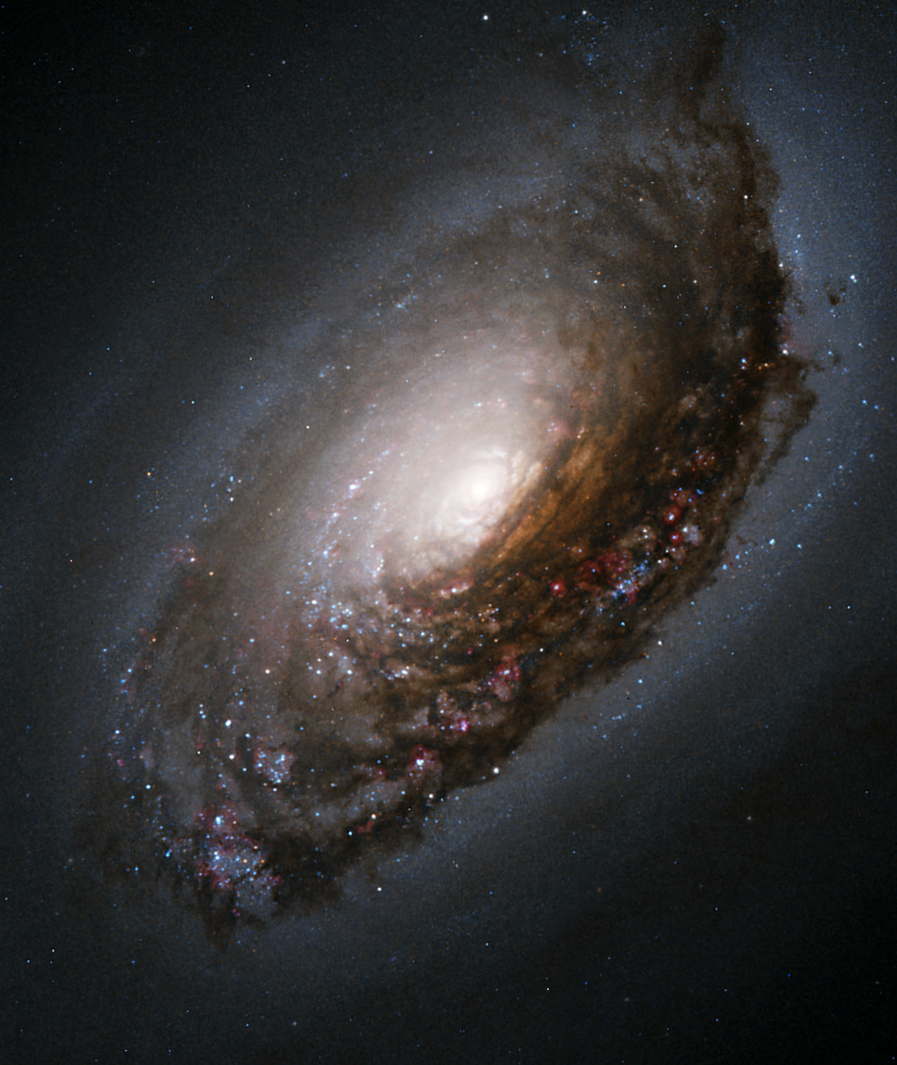

An abrasive collision gives one galaxy a "black eye"

A collision of two galaxies has left a merged star system with an unusual appearance as well as bizarre internal motions. Messier 64 (M64) has a spectacular dark band of absorbing dust in front of the galaxy's bright nucleus, giving rise to its nicknames of the "Black Eye" or "Evil Eye" galaxy.

Fine details of the dark band are revealed in this image of the central portion of M64 obtained with the Hubble Space Telescope. M64 is well known among amateur astronomers because of its appearance in small telescopes. It was first cataloged in the 18th century by the French astronomer Messier. Located in the northern constellation Coma Berenices, M64 resides roughly 17 million light-years from Earth.

Credit: NASA/ESA and The Hubble Heritage Team (AURA/STScI)